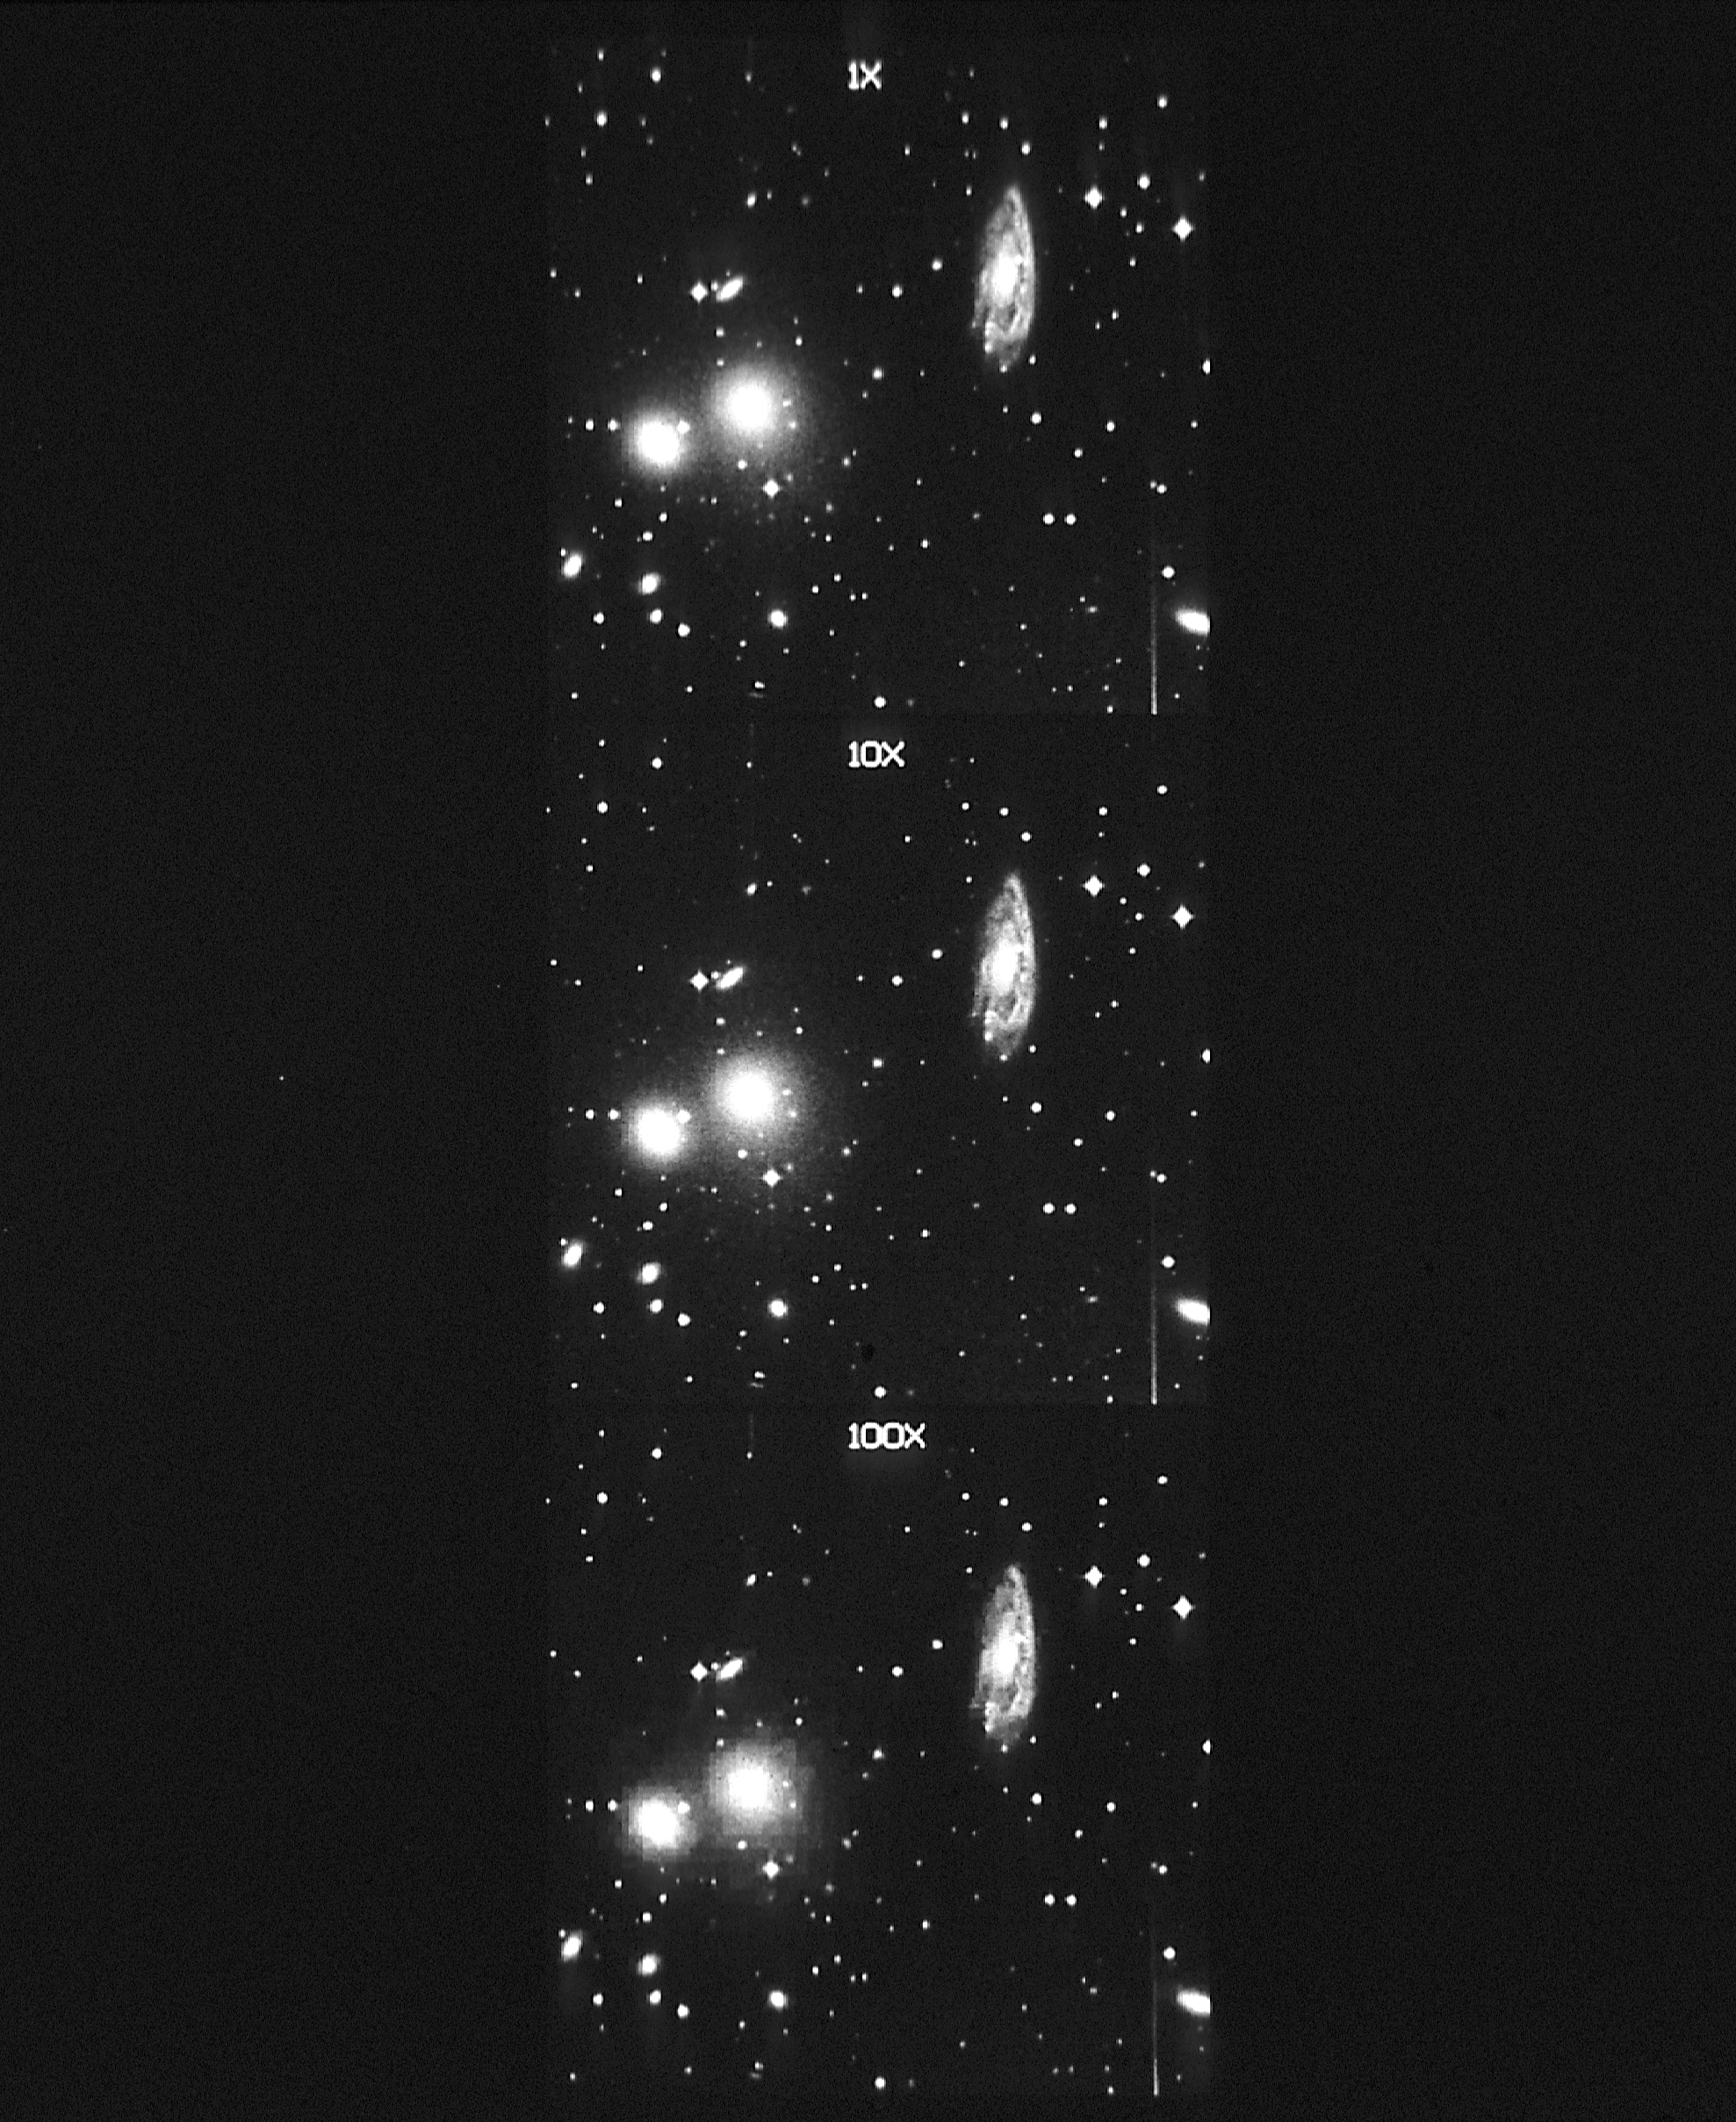

Digitized all sky-survey (ground-based image)

These three pictures show a section of the digitized all sky-survey at different compression factors. The images will be written into CDROM (Compact Disk Read-Only Memory) format and will be available to professional and amateur astronomers. The sample image is of a 11.3 arc minute square region of the Hydra cluster of galaxies (Abell 1060), show in the spiral galaxy NGC 3312, and the elliptical galaxies NGC 3312 (right) and NGC 3309 (left).

The top image was digitized from a SRC southern sky survey plate. The image 400 pixels picture elements on a side. The center picture has been compressed by a ratio of 10:1 and is useful for a wide range of astronomical research applications.

Credit: STScI